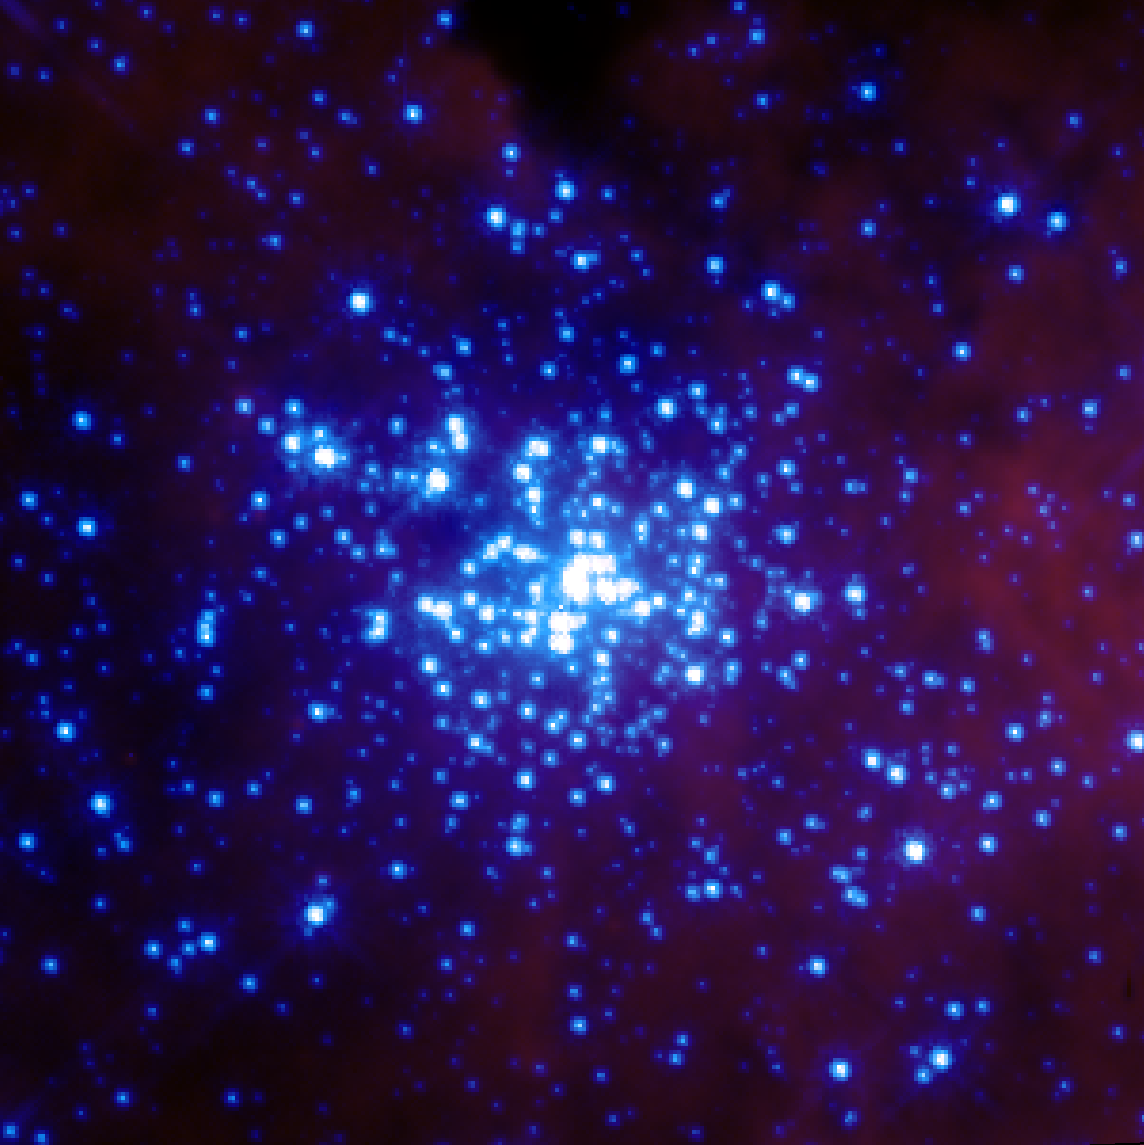

Star Cluster R136

The star cluster R136 is a cluster of young, bright stars in 30 Doradus.

The image of the cluster was obtained using the second generation Wide Field and Planetary Camera (WFPC-2) in 1994.

Credit: NASA, STScI, ESA/Hubble